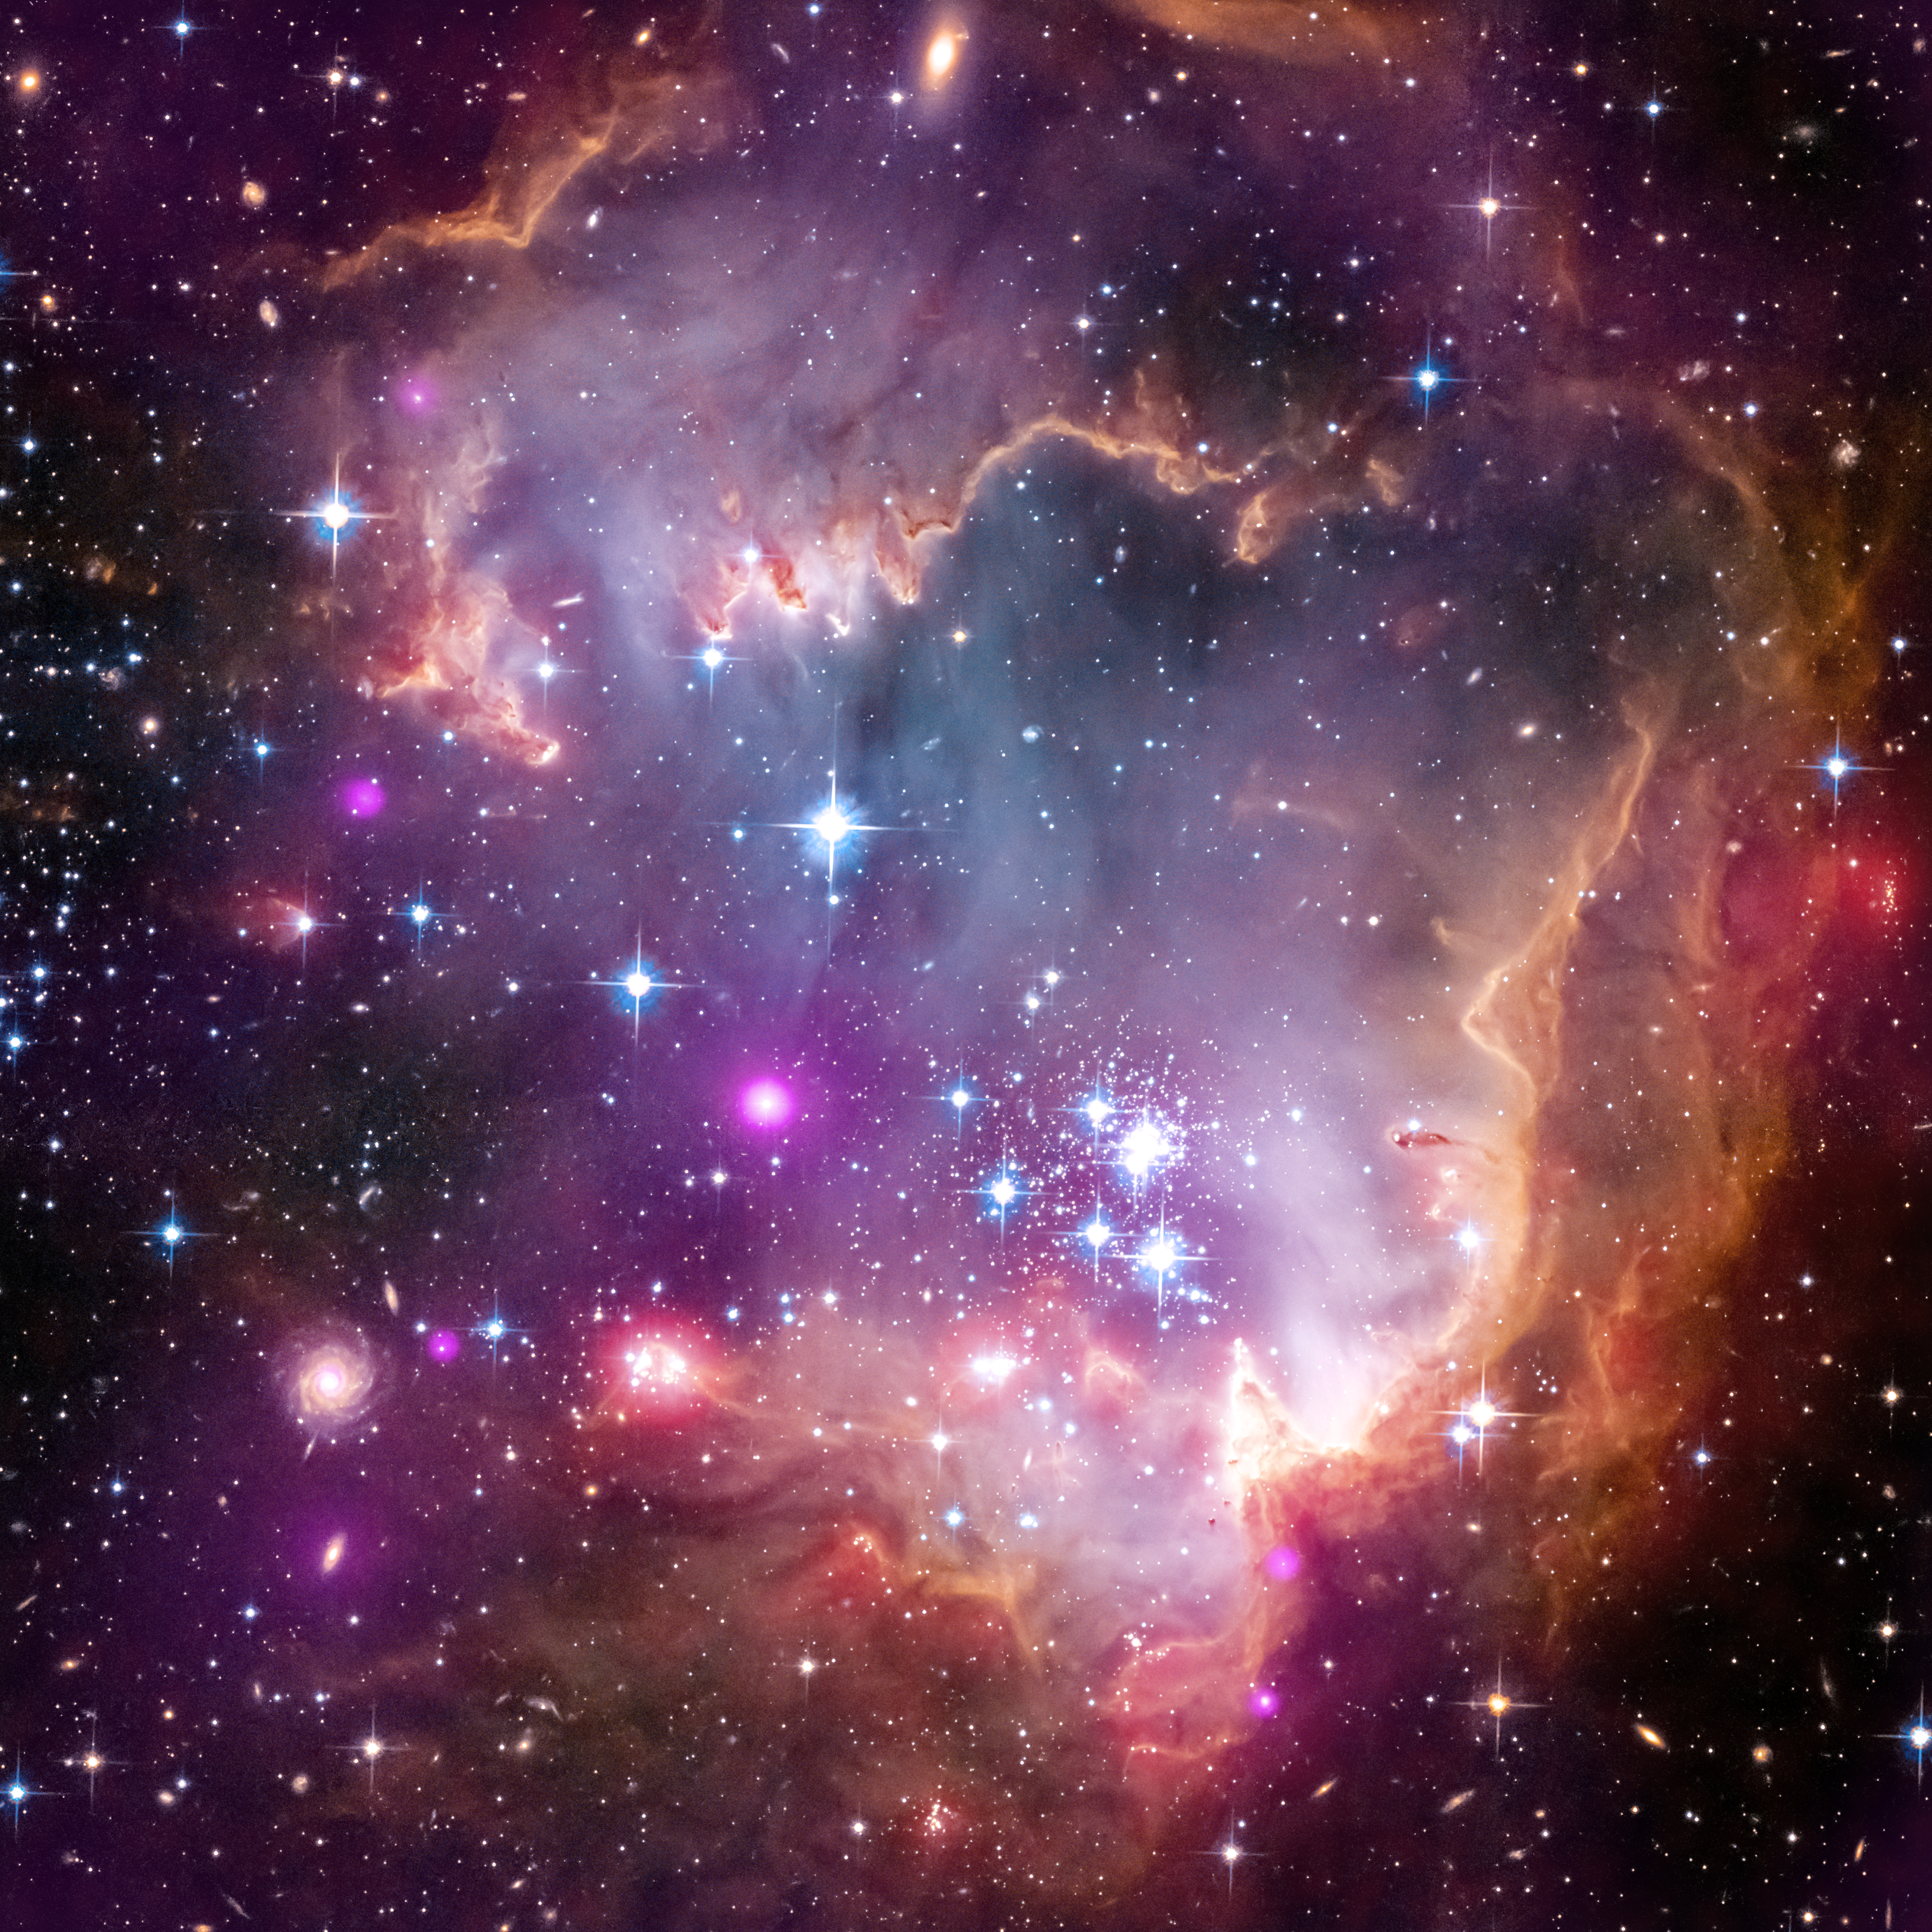

Hubble/Chandra/Spitzer composite image of NGC 602, in the “wing” of the Small Magellanic Cloud

NASA’s Chandra X-ray telescope has made the first detection of X-ray emission from young solar-type stars that lie outside our Milky Way galaxy. They live in a region known as the “Wing” of the Small Magellanic Cloud, a satellite galaxy of our Milky Way.

X-rays from young stars trace how active their magnetic fields are. Magnetic activity provides clues to a star’s rotation rate and the rising and falling of hot gas in the star’s interior. Astronomers suggest that if the X-ray properties of young stars are similar in different environments around our galaxy, then other related properties, such as the formation of planets, are also likely to be similar.

In this composite image of the Wing from NASA’s Great Observatories, the Chandra data are shown in purple; visible light seen by the NASA/ESA Hubble Space Telescope is in red, green, and blue; and infrared data from the Spitzer Space Telescope are coloured red.

Credit: X-ray: NASA/CXC/Univ.Potsdam/L.Oskinova et al; Optical: ESA, NASA/STScI; Infrared: NASA/JPL-Caltech